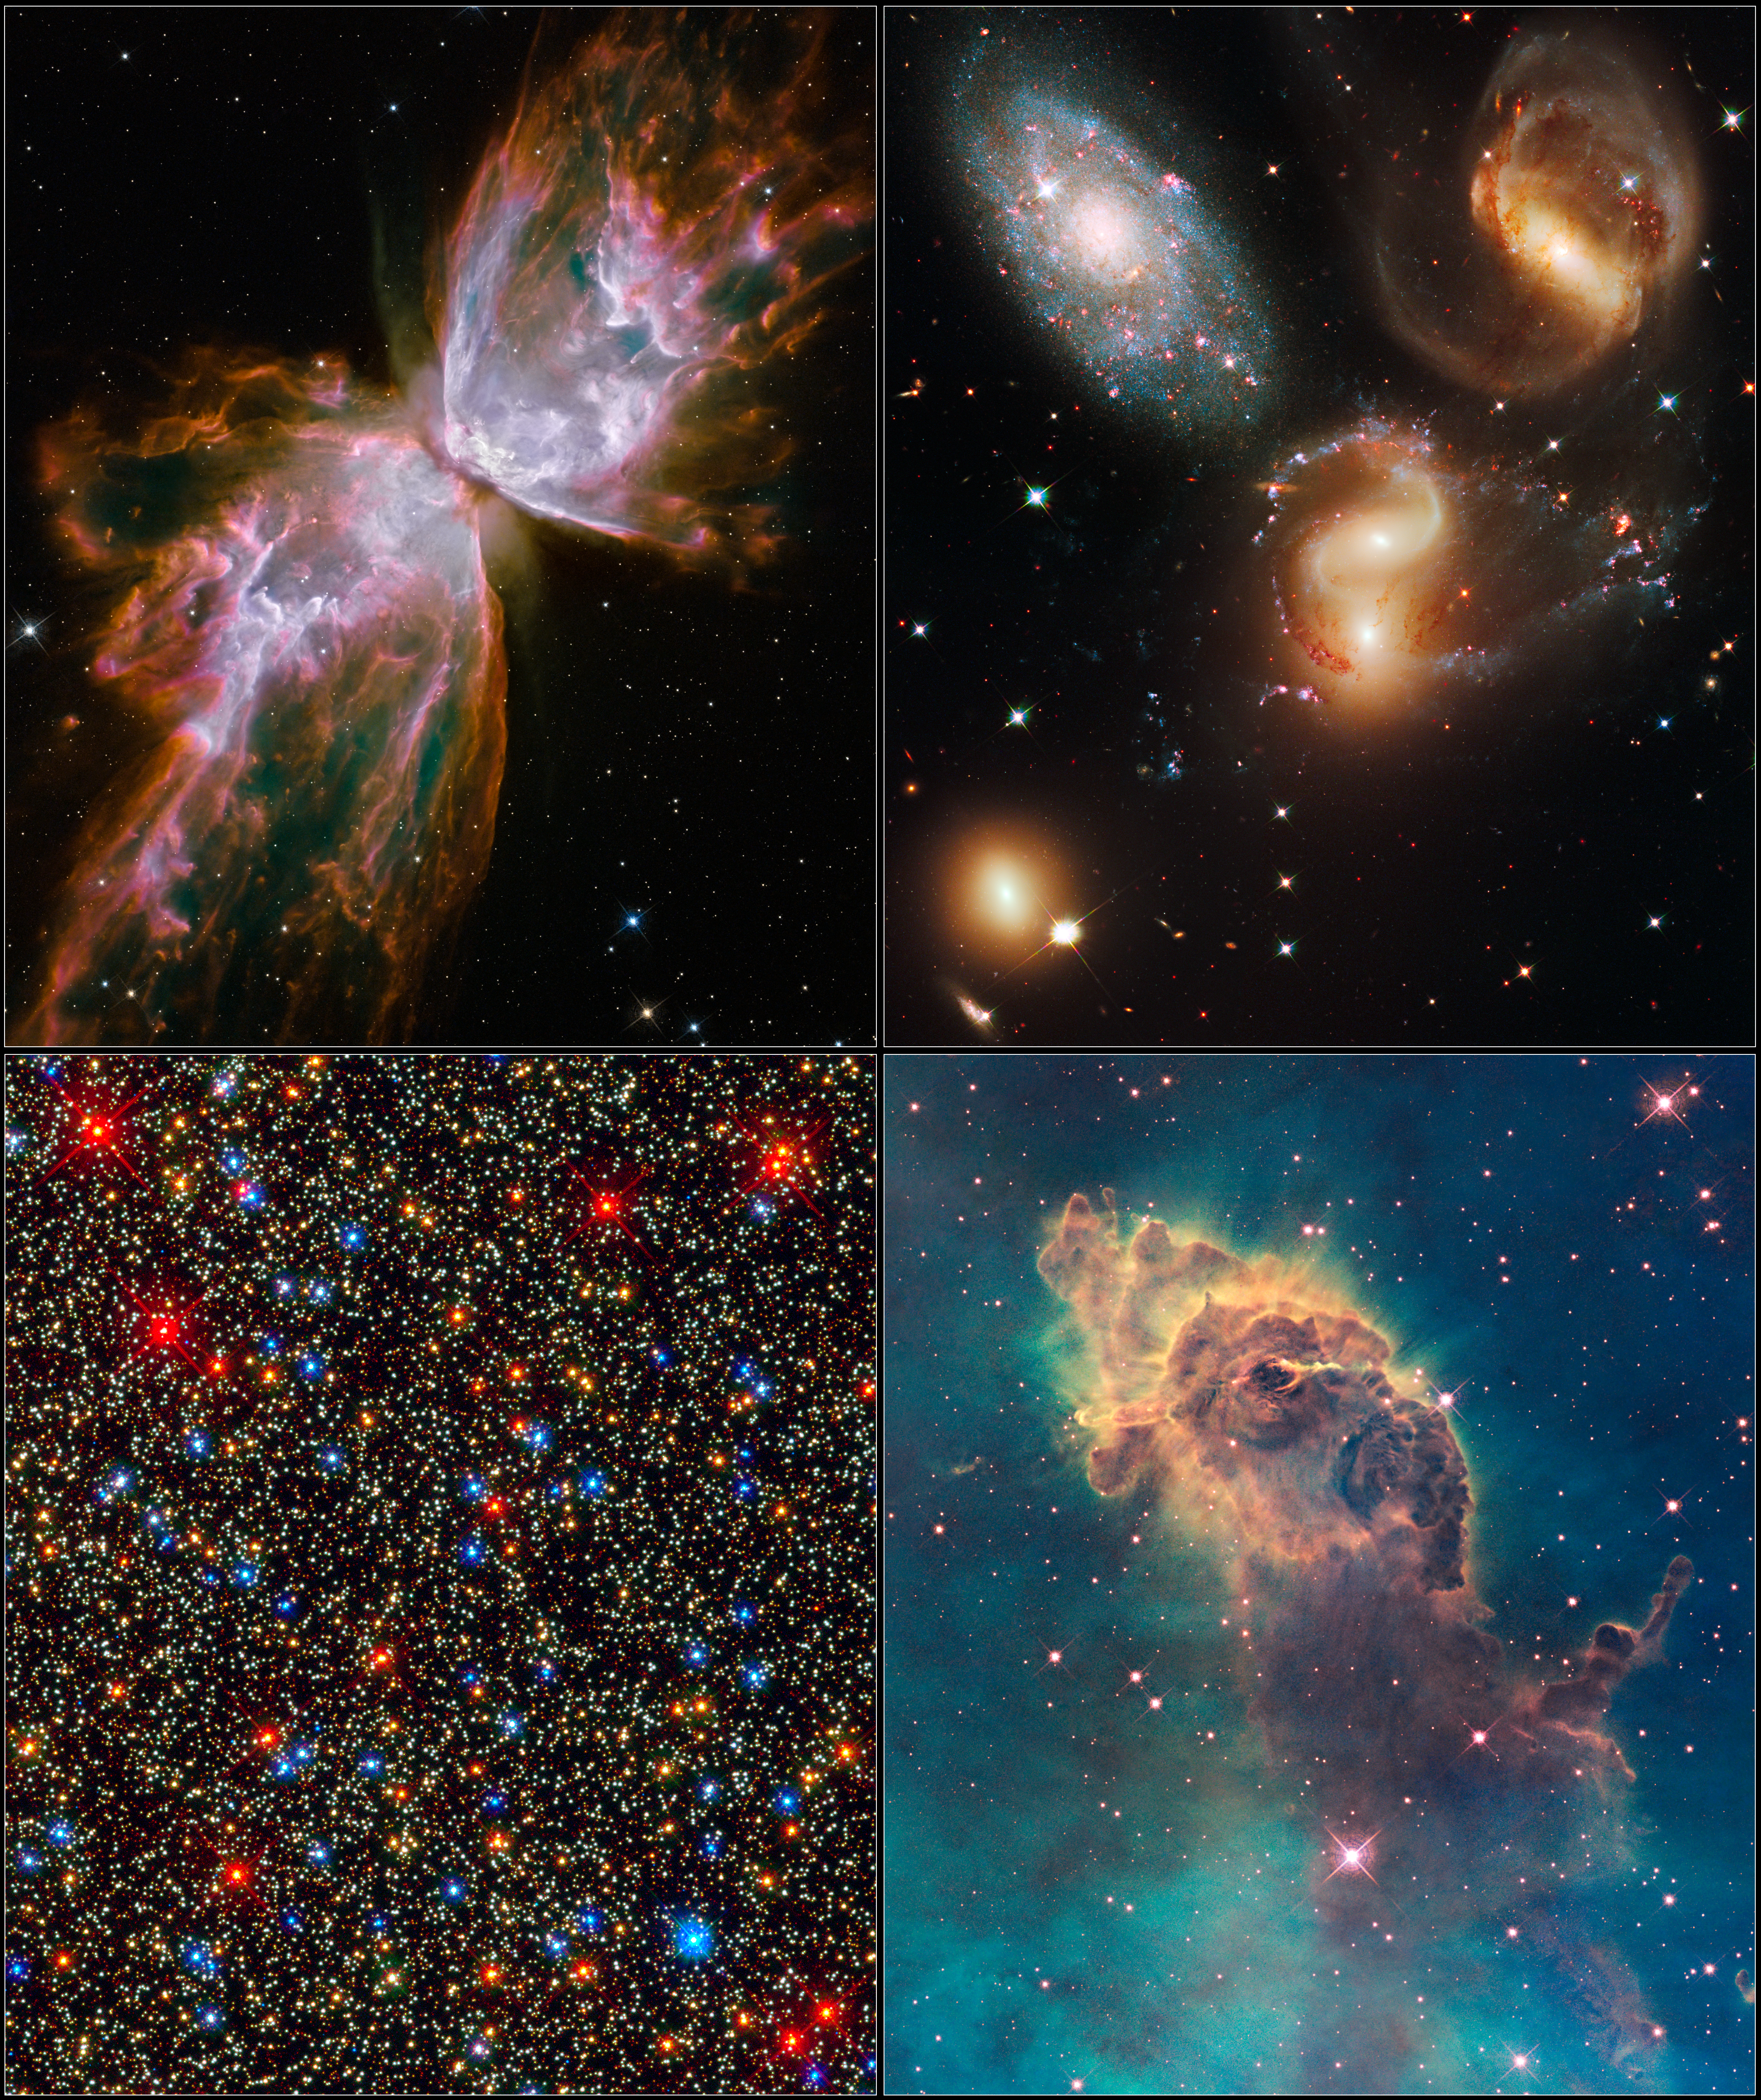

First images after Servicing Mission 4

These four images are among the first observations made by the new Wide Field Camera 3 aboard the upgraded NASA/ESA Hubble Space Telescope.

The image at top left shows the Bug Nebula, a butterfly-shaped nebula surrounding a dying star. At top right, is a picture of a clash among members of a galactic grouping called Stephan's Quintet. The image at bottom left, gives viewers a panoramic portrait of a colourful assortment of 100,000 stars residing in the crowded core of Omega Centauri, a giant globular cluster. At bottom right, an eerie pillar of star birth in the Carina Nebula rises from a sea of greenish-coloured clouds.

Credit: NASA, ESA and the Hubble SM4 ERO Team